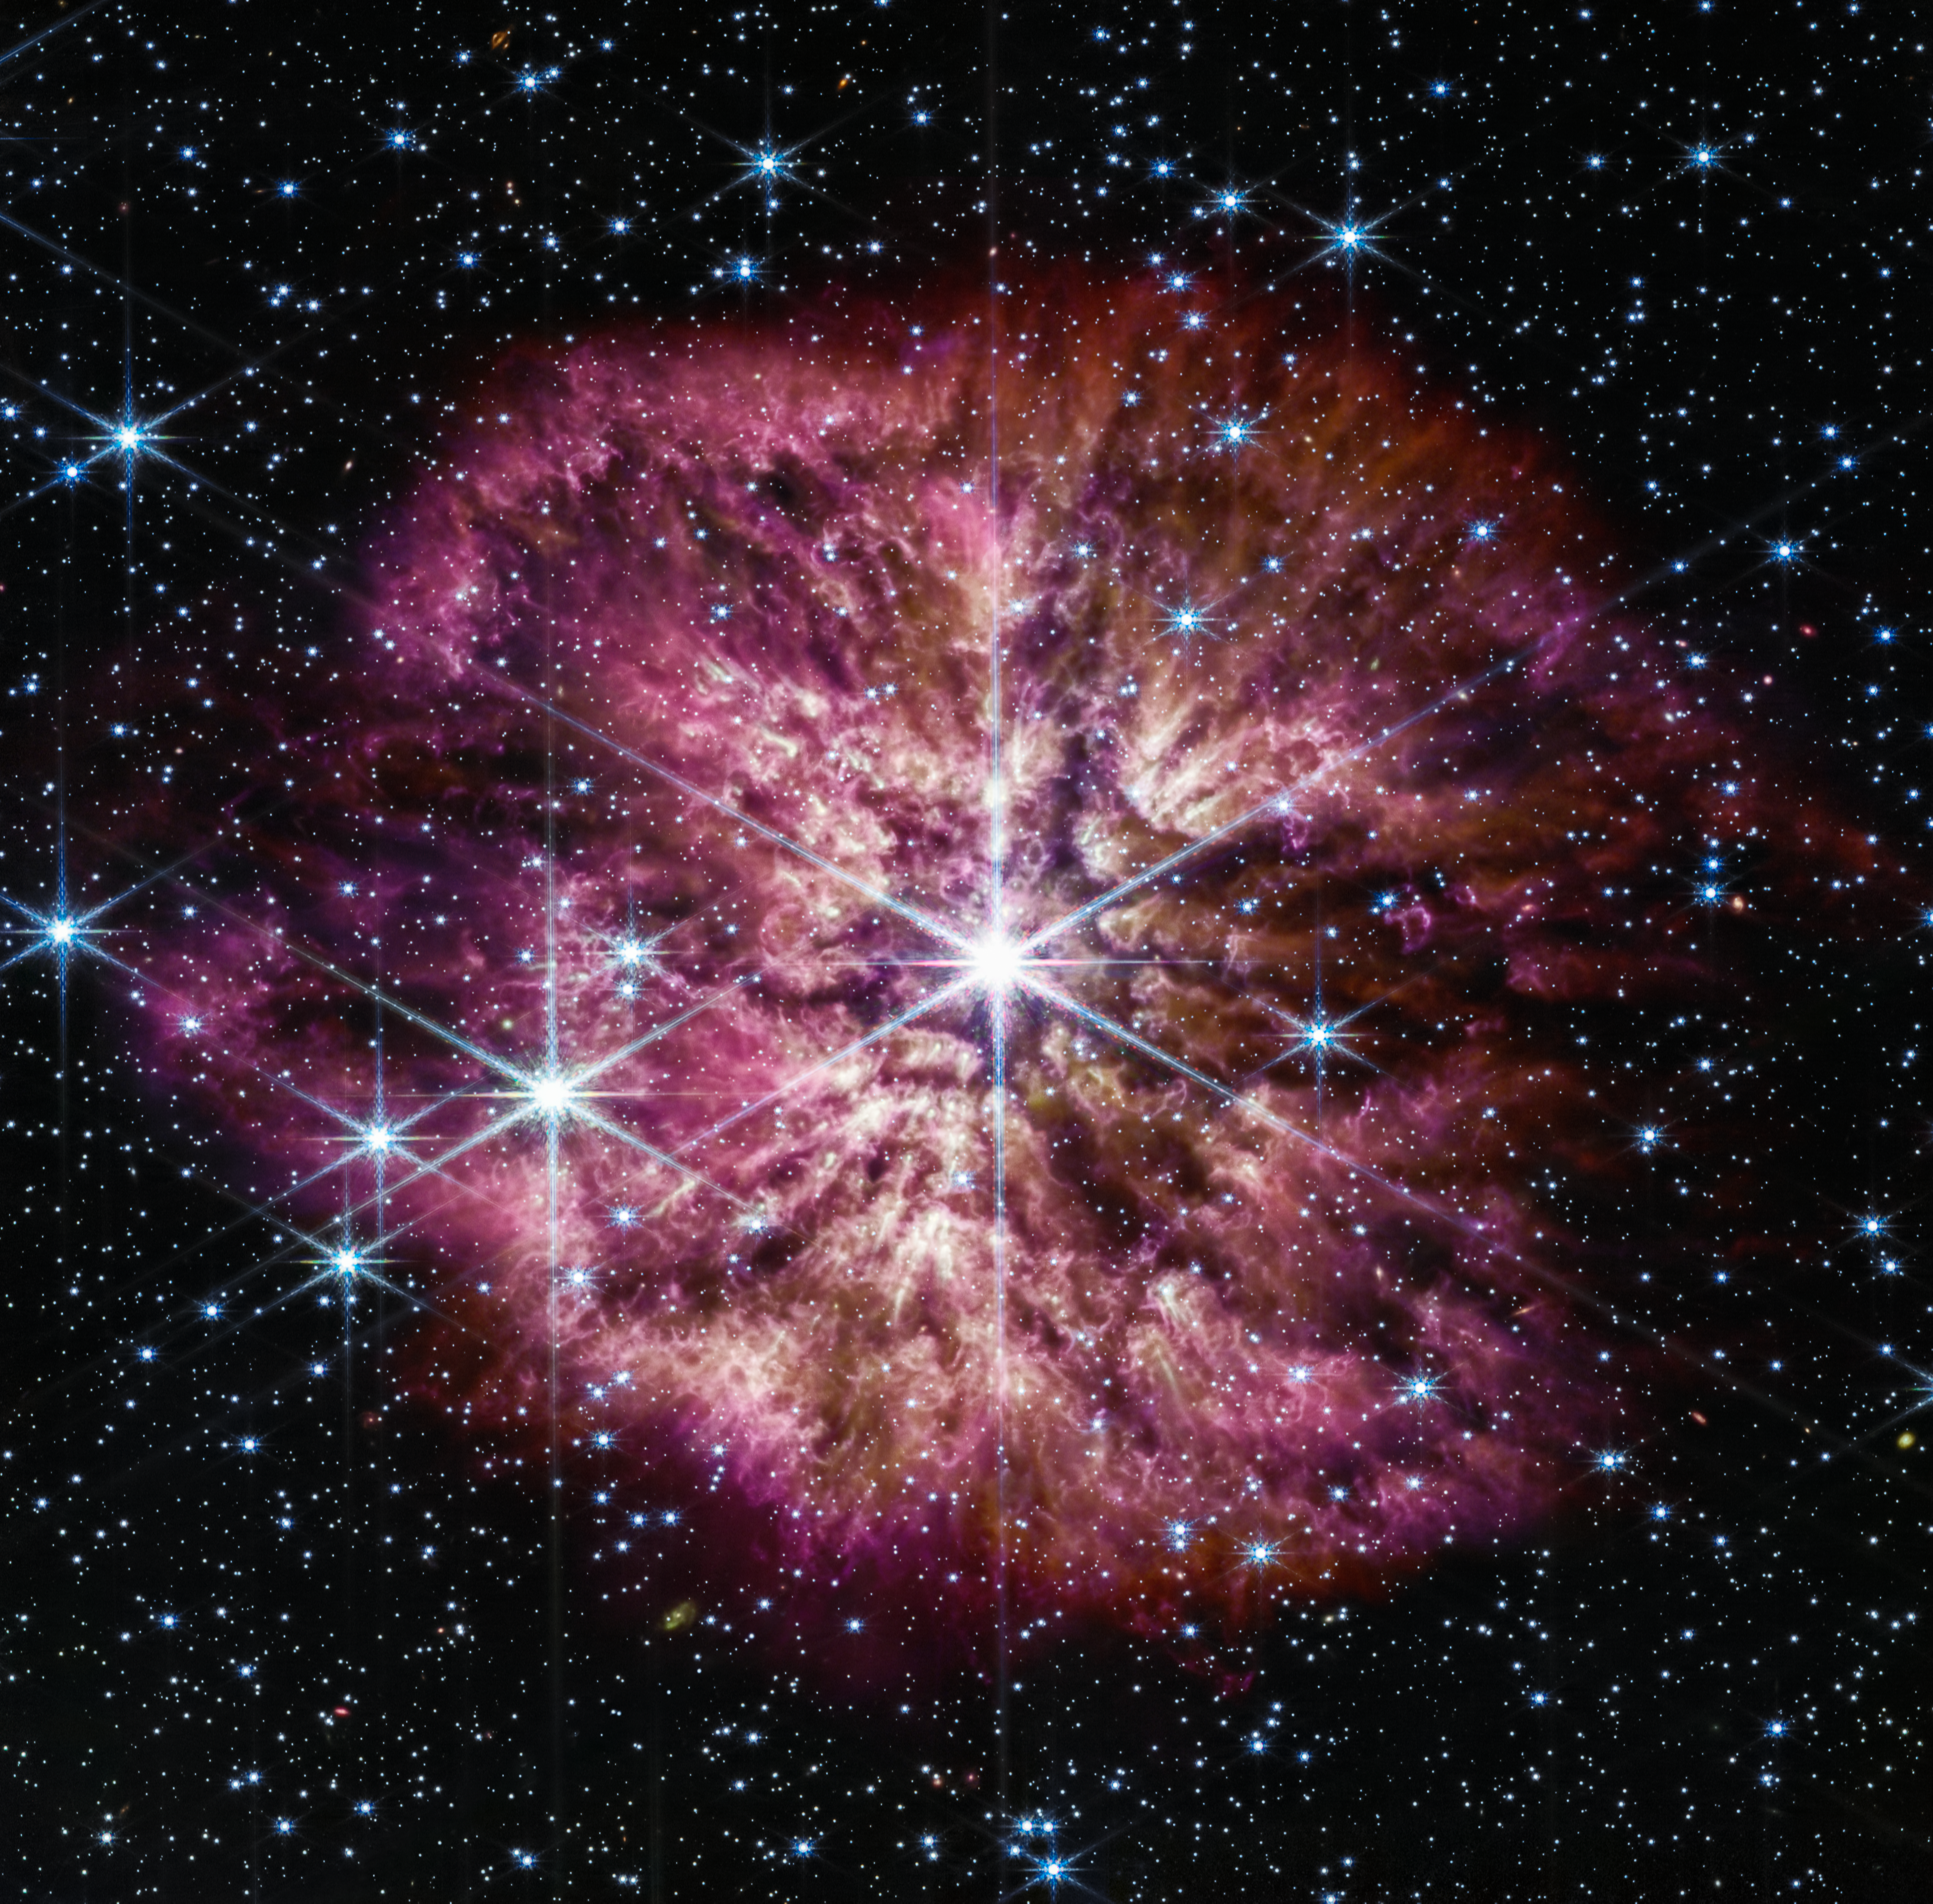

Wolf-Rayet 124 (NIRCam and MIRI composite image)

The luminous, hot star Wolf-Rayet 124 (WR 124) is prominent at the centre of the NASA/ESA/CSA James Webb Space Telescope’s composite image combining near-infrared and mid-infrared wavelengths of light. The star displays the characteristic diffraction spikes of Webb’s Near-infrared Camera (NIRCam), caused by the physical structure of the telescope itself. NIRCam effectively balances the brightness of the star with the fainter gas and dust surrounding it, while Webb’s Mid-Infrared Instrument (MIRI) reveals the nebula’s structure.

Background stars and galaxies populate the field of view and peek through the nebula of gas and dust that has been ejected from the ageing massive star to span 10 light-years across space. A history of the star’s past episodes of mass loss can be read in the nebula’s structure. Rather than smooth shells, the nebula is formed from random, asymmetric ejections. Bright clumps of gas and dust appear like tadpoles swimming toward the star, their tails streaming out behind them, blown back by the stellar wind.

This image combines various filters from both Webb imaging instruments, with the colour red assigned to wavelengths of 4.44, 4.7, 12.8, and 18 microns (F444W, F470N, F1280W, F1800W), green to 2.1, 3.35, and 11.3 microns (F210M, F335M, F1130W), and blue to 0.9, 1.5, and 7.7 microns (F090W, F150W, F770W).

Credit: NASA, ESA, CSA, STScI, Webb ERO Production Team